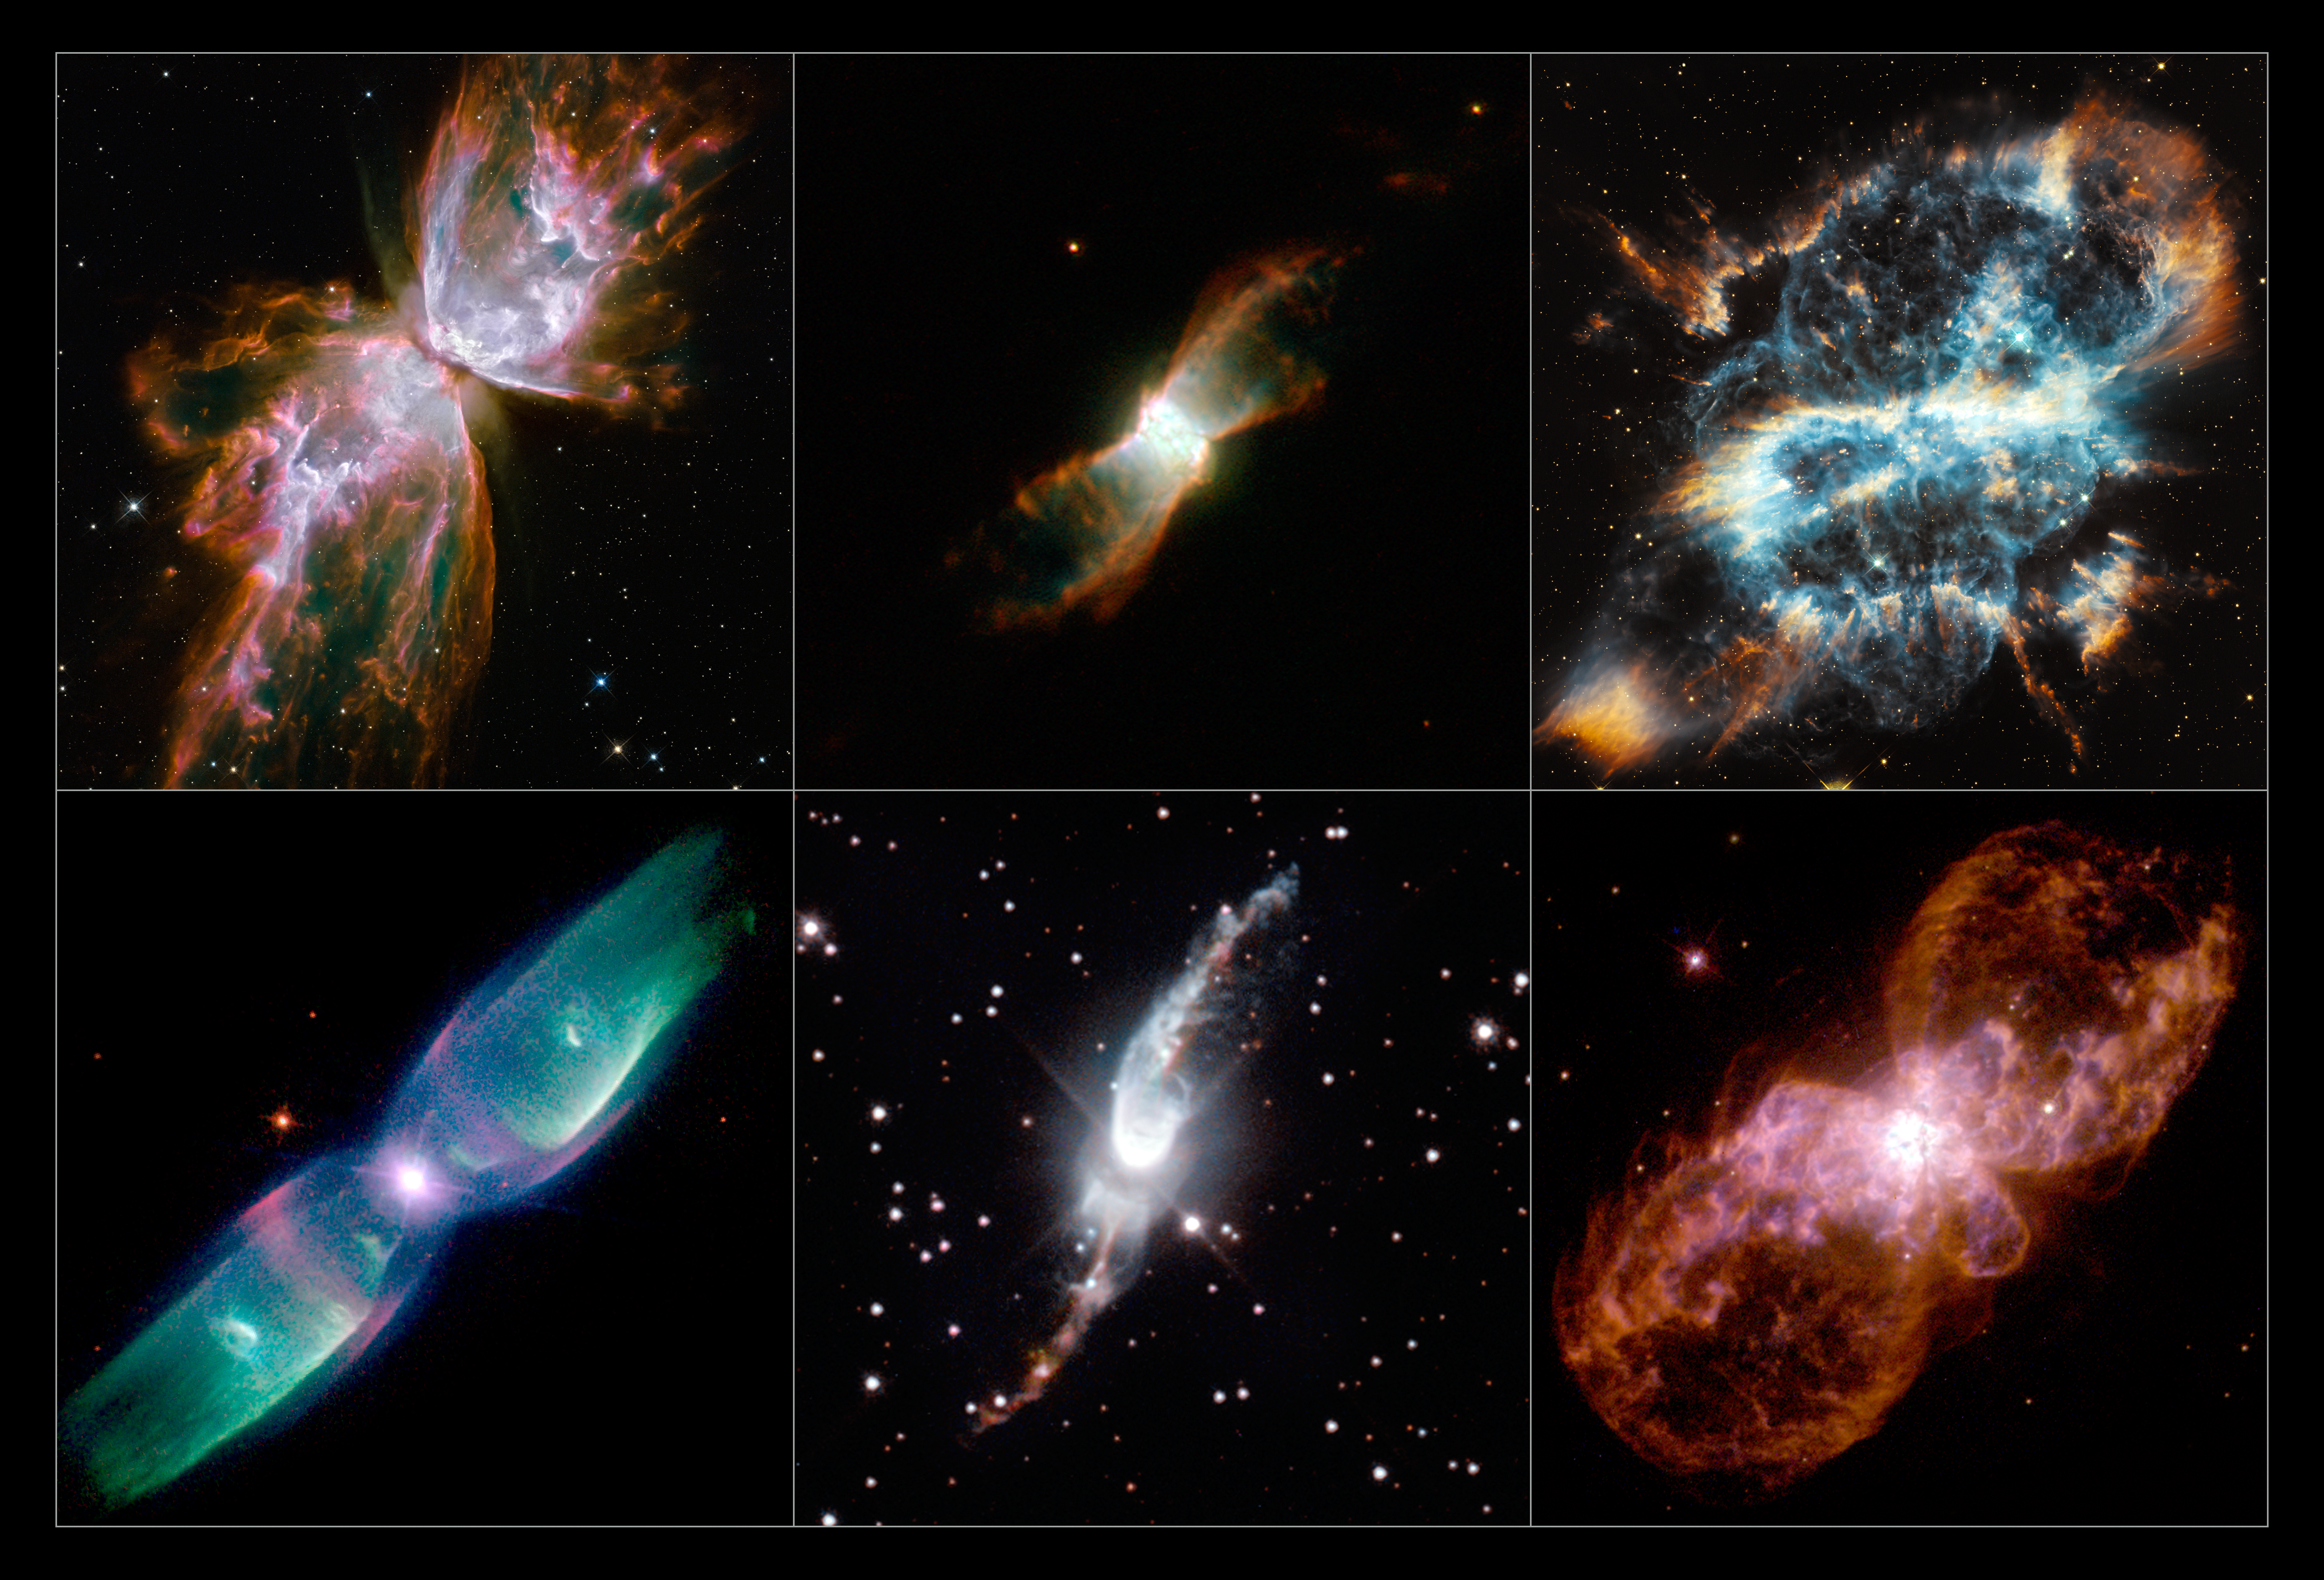

A selection of Hubble’s planetary nebulae

This mosaic shows a selection of stunning images of bipolar planetary nebulae taken by Hubble.

A new study using Hubble observations has found that bipolar planetary nebulae located towards the central bulge of our Milky Way appear to be strangely aligned in the sky — a surprising result given their varied histories. The nebulae shown here were not involved in this new study, but demonstrate the varied forms of these spectacular objects.

Row 1 (from upper left): NGC 6302, NGC 6881, NGC 5189
Row 2 (from lower left) : M2-9, Hen 3-1475, Hubble 5

Credit: ESA/Hubble & NASA NGC 6302: NASA, ESA and the Hubble SM4 ERO Team NGC 6881: ESA/Hubble & NASA NGC 5189: NASA, ESA and the Hubble Heritage Team (STScI/AURA) M2-9: Bruce Balick (University of Washington), Vincent Icke (Leiden University, The Netherlands), Garrelt Mellema (Stockholm University), and NASA/ESA Hen 3-1475: ESA/Hubble & NASA Hubble 5: Bruce Balick (University of Washington), Vincent Icke (Leiden University, The Netherlands), Garrelt Mellema (Stockholm University), and NASA/ESA